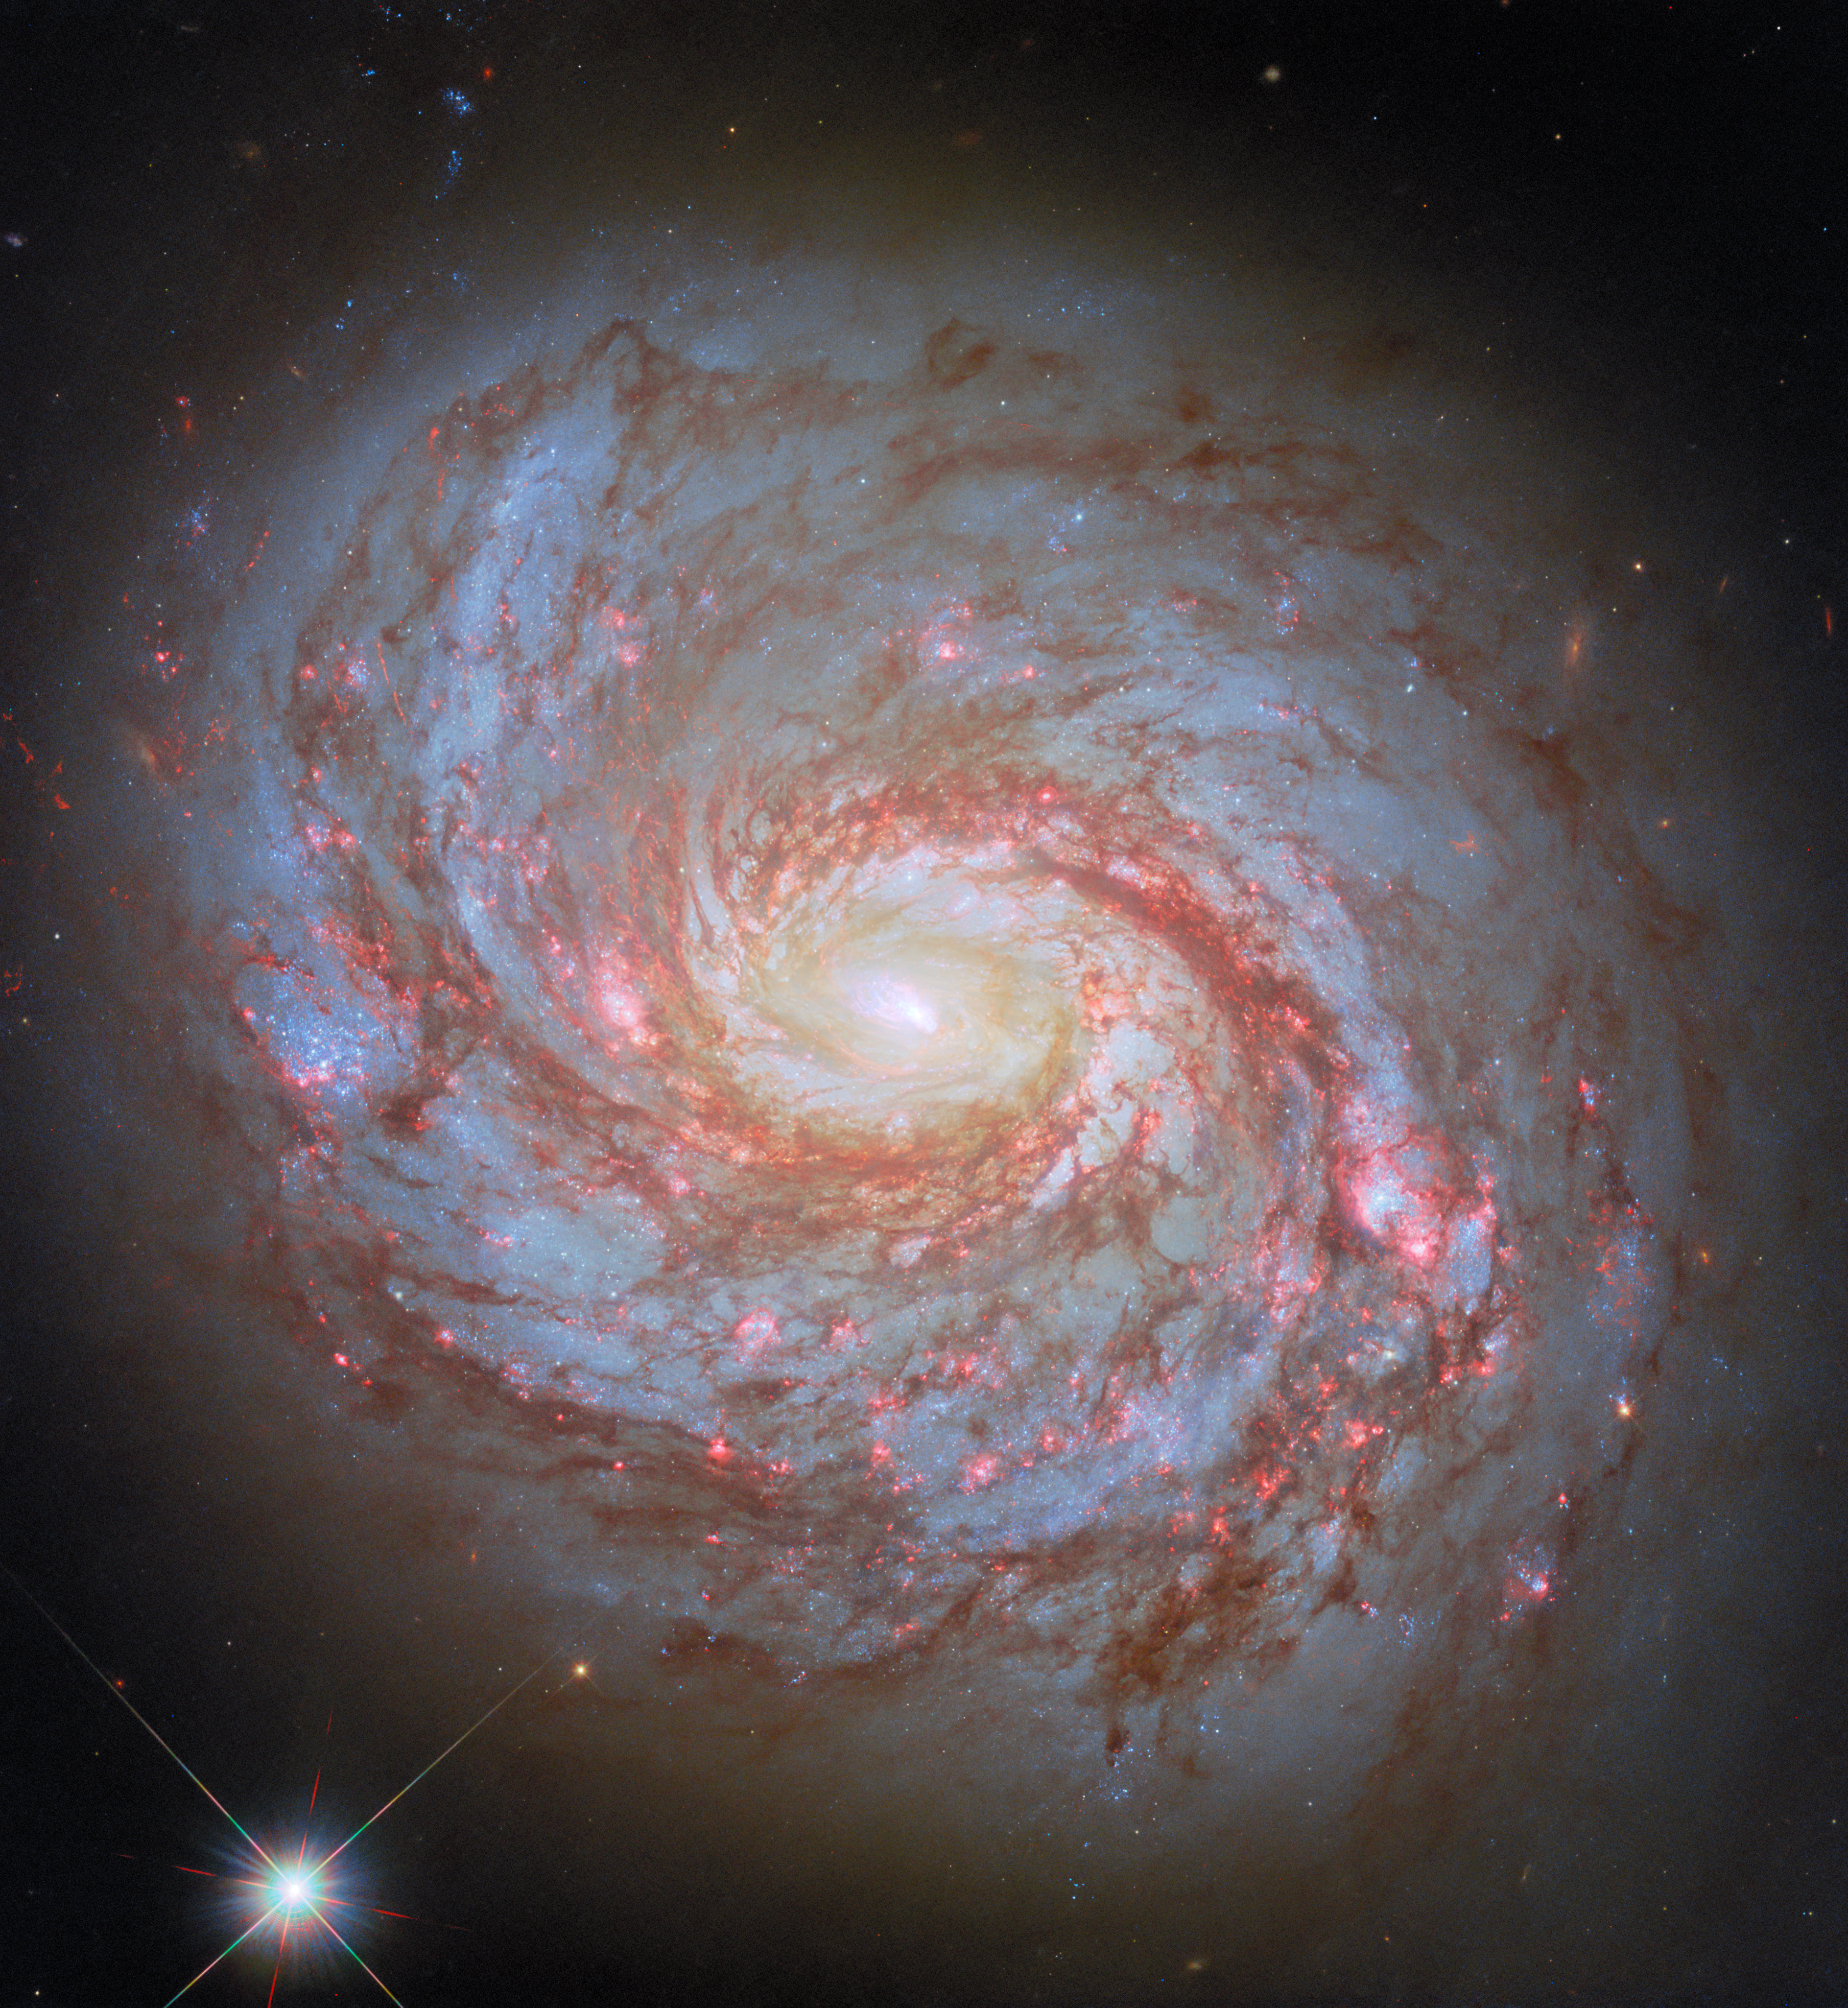

The squid and the whale

Today’s rather aquatic-themed NASA/ESA Hubble Space Telescope Picture of the Week features the spiral galaxy Messier 77, also known as the Squid Galaxy, which sits 45 million light-years away in the constellation Cetus (The Whale).

The designation Messier 77 comes from the galaxy’s place in the famous catalogue compiled by the French astronomer Charles Messier. Another French astronomer, Pierre Méchain, discovered the galaxy in 1780. Both Messier and Méchain were comet hunters who catalogued nebulous objects that could be mistaken for comets.

Messier, Méchain, and other astronomers of their time mistook the Squid Galaxy for either a spiral nebula or a star cluster. This mischaracterisation isn’t surprising. More than a century would pass between the discovery of the Squid Galaxy and the realisation that the ‘spiral nebulae’ scattered across the sky were not part of our galaxy and were in fact separate galaxies millions of light-years away. The Squid Galaxy’s appearance through a small telescope — an intensely bright centre surrounded by a fuzzy cloud — closely resembles one or more stars wreathed in a nebula.

The name ‘Squid Galaxy’ only came about recently. This name comes from the extended, filamentary structure that curls around the galaxy’s disc like the tentacles of a squid. The Squid Galaxy is a great example of how advances in technology and scientific understanding can completely change our perception of an astronomical object — and even what we call it!

A Hubble image of the Squid Galaxy was previously released in 2013. This new version incorporates recent observations made with different filters and updated image processing techniques.

Credit: ESA/Hubble & NASA, L. C. Ho, D. Thilker